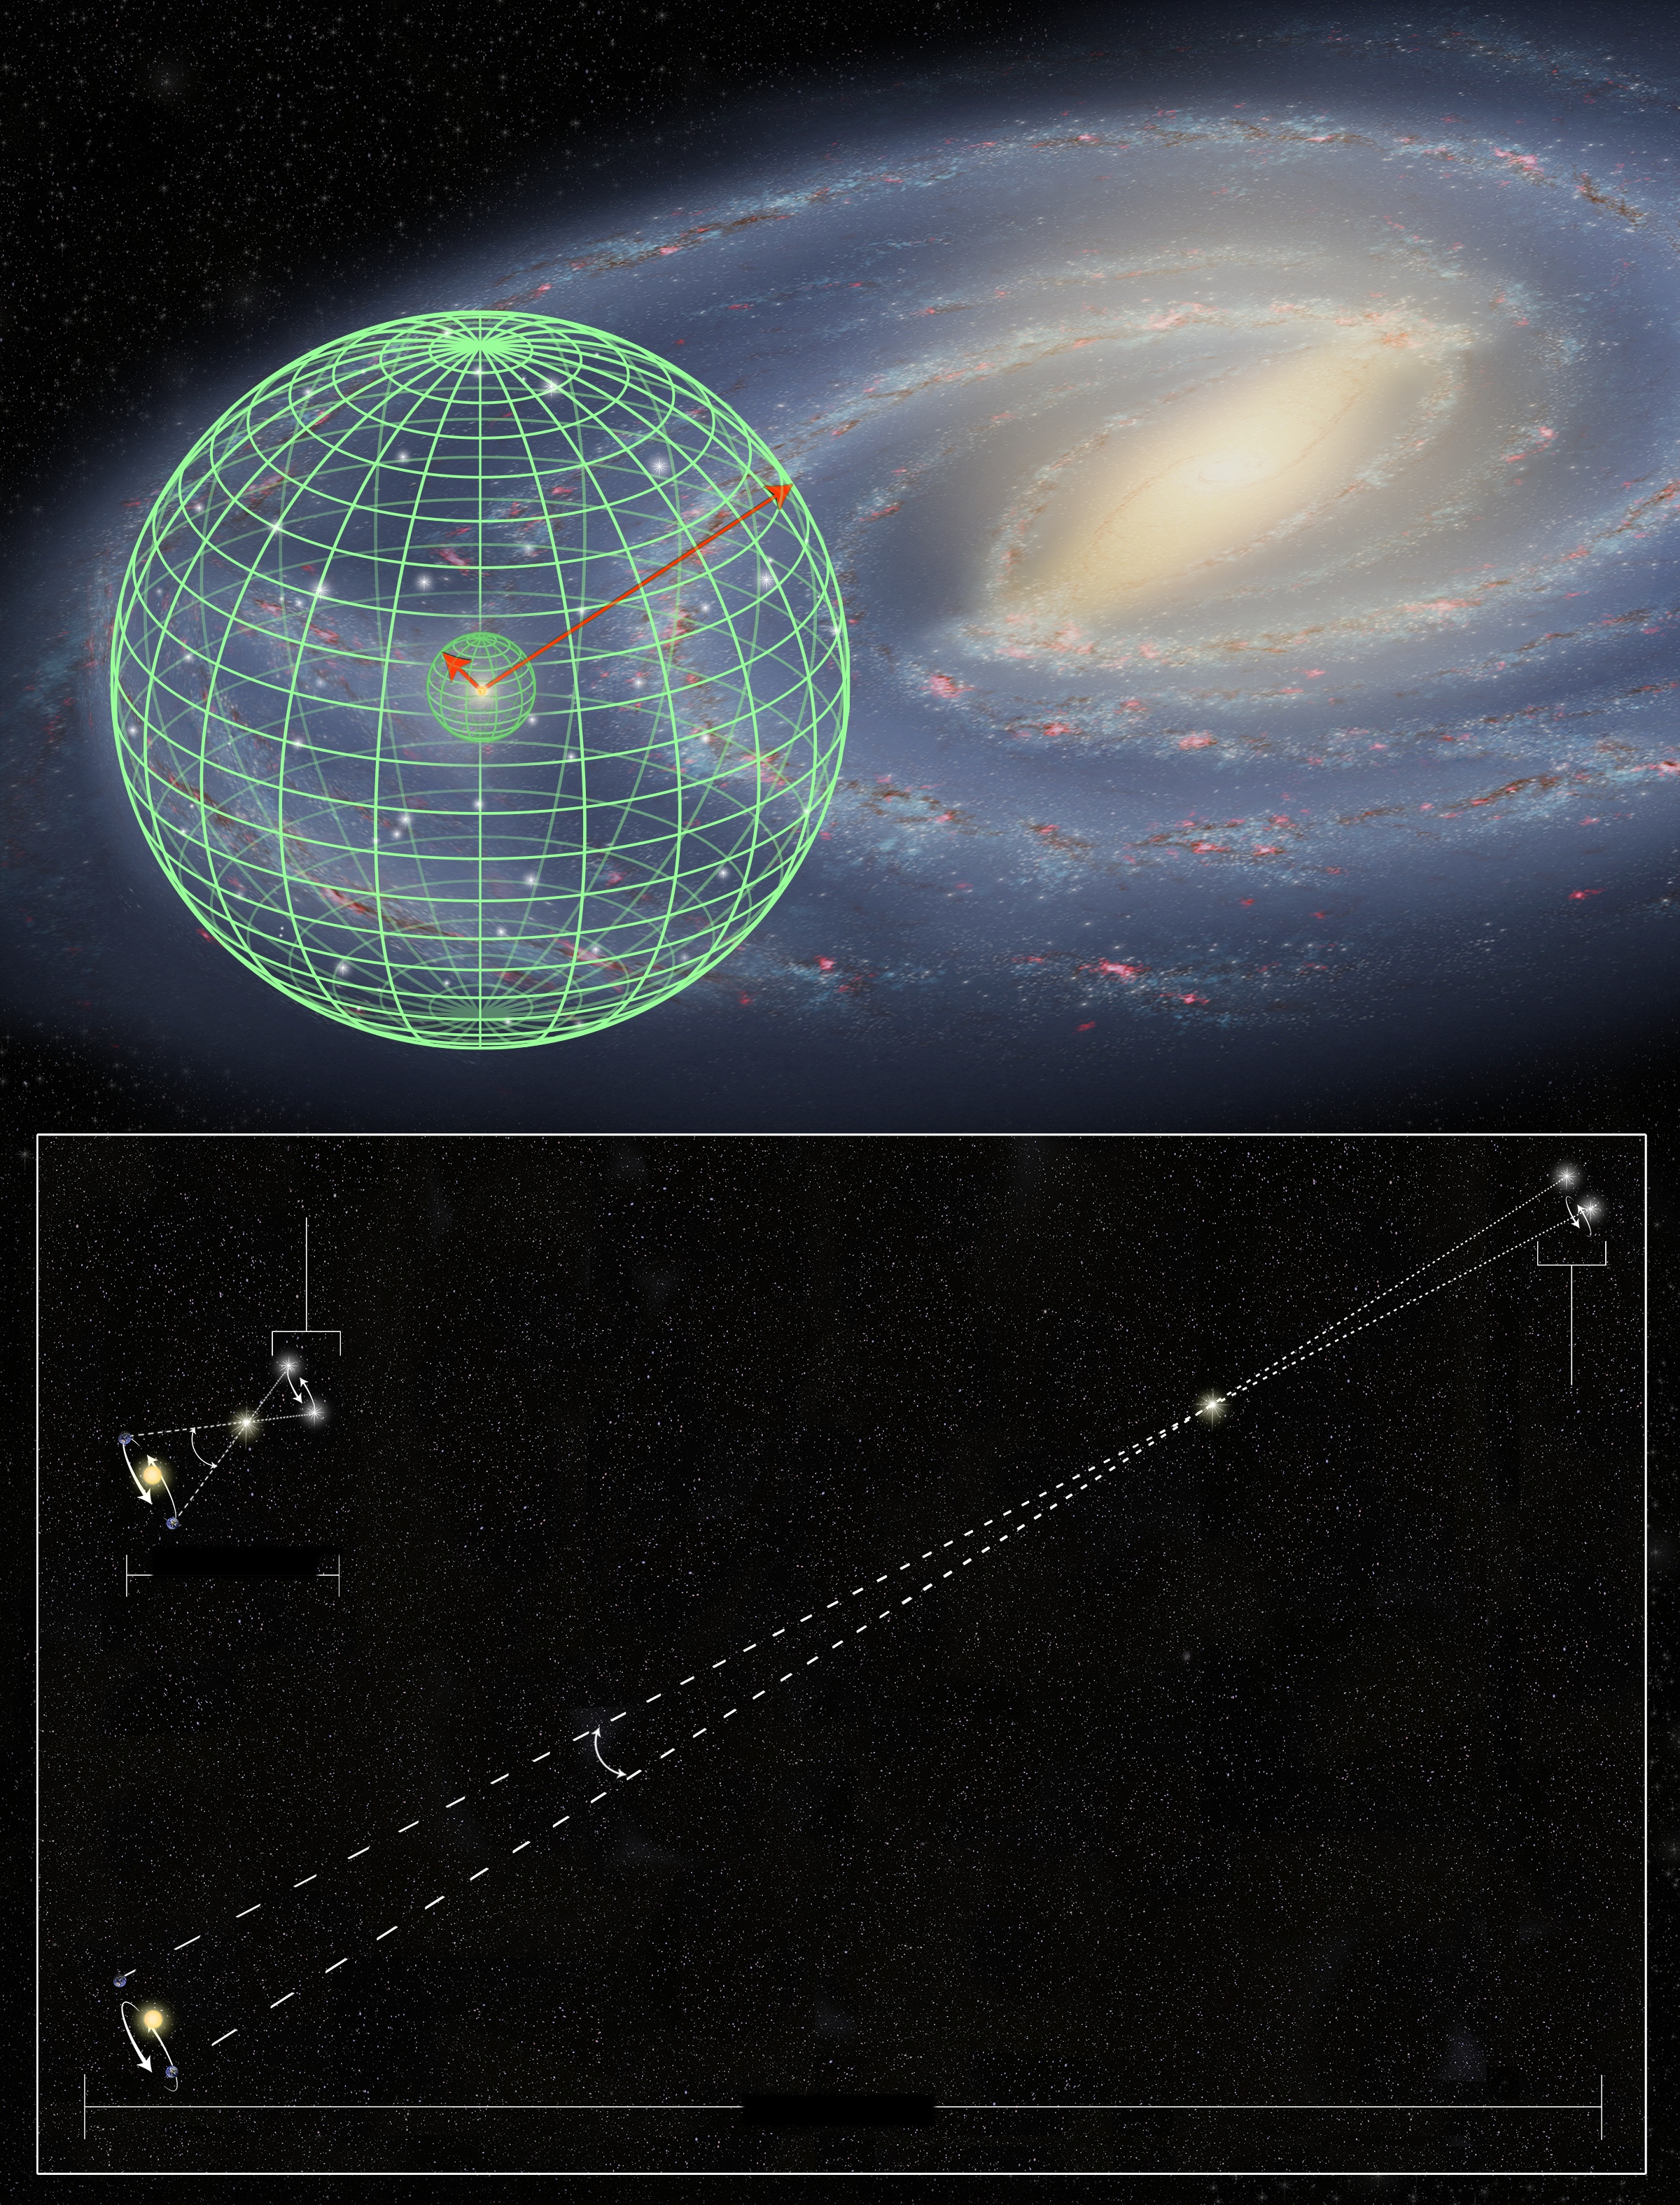

Hubble stretches the stellar tape measure ten times further

This illustration shows the precision stellar distance measurement from the NASA/ESA Hubble Space Telescope and how it has been extended 10 times further into our Milky Way galaxy than ever before. This greatly expands the volume of space accessible for refining the cosmic tape measure needed for measuring the size of the Universe. This type of measurement is based on trigonometric parallax, a geometric method commonly used by astronomers.

Credit: NASA, ESA, and A. Feild (STScI) Science Credit: NASA, ESA, A. Riess (JHU/STScI), S. Casertano (STScI/JHU), J. Anderson and J. MacKenty (STScI), and A. Filippenko (University of California, Berkeley)